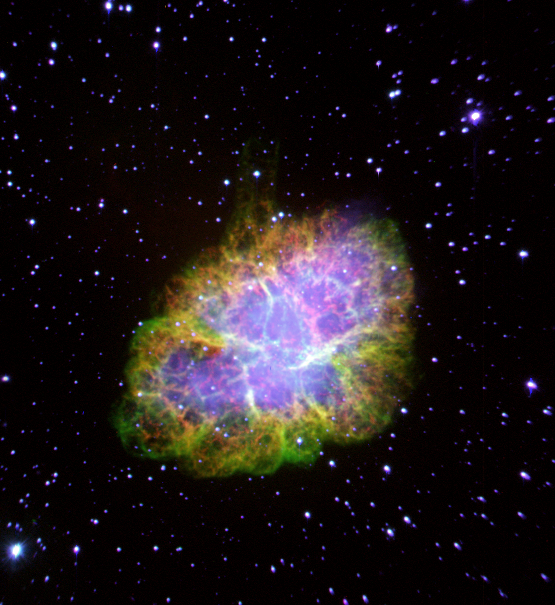

The Crab Nebula

This colorful photo shows a ground-based image of the entire Crab Nebula, the remnant of a supernova explosion witnessed over 900 years ago.

The nebula, which is 10 light-years across, is located 7, 000 light-years away in the constellation Taurus. The green, yellow and red filaments concentrated toward the edges of the nebula are remnants of the star that were ejected into space by the explosion.

Credit: Jeff Hester and Paul Scowen (Arizona State University), and NASA/ESA